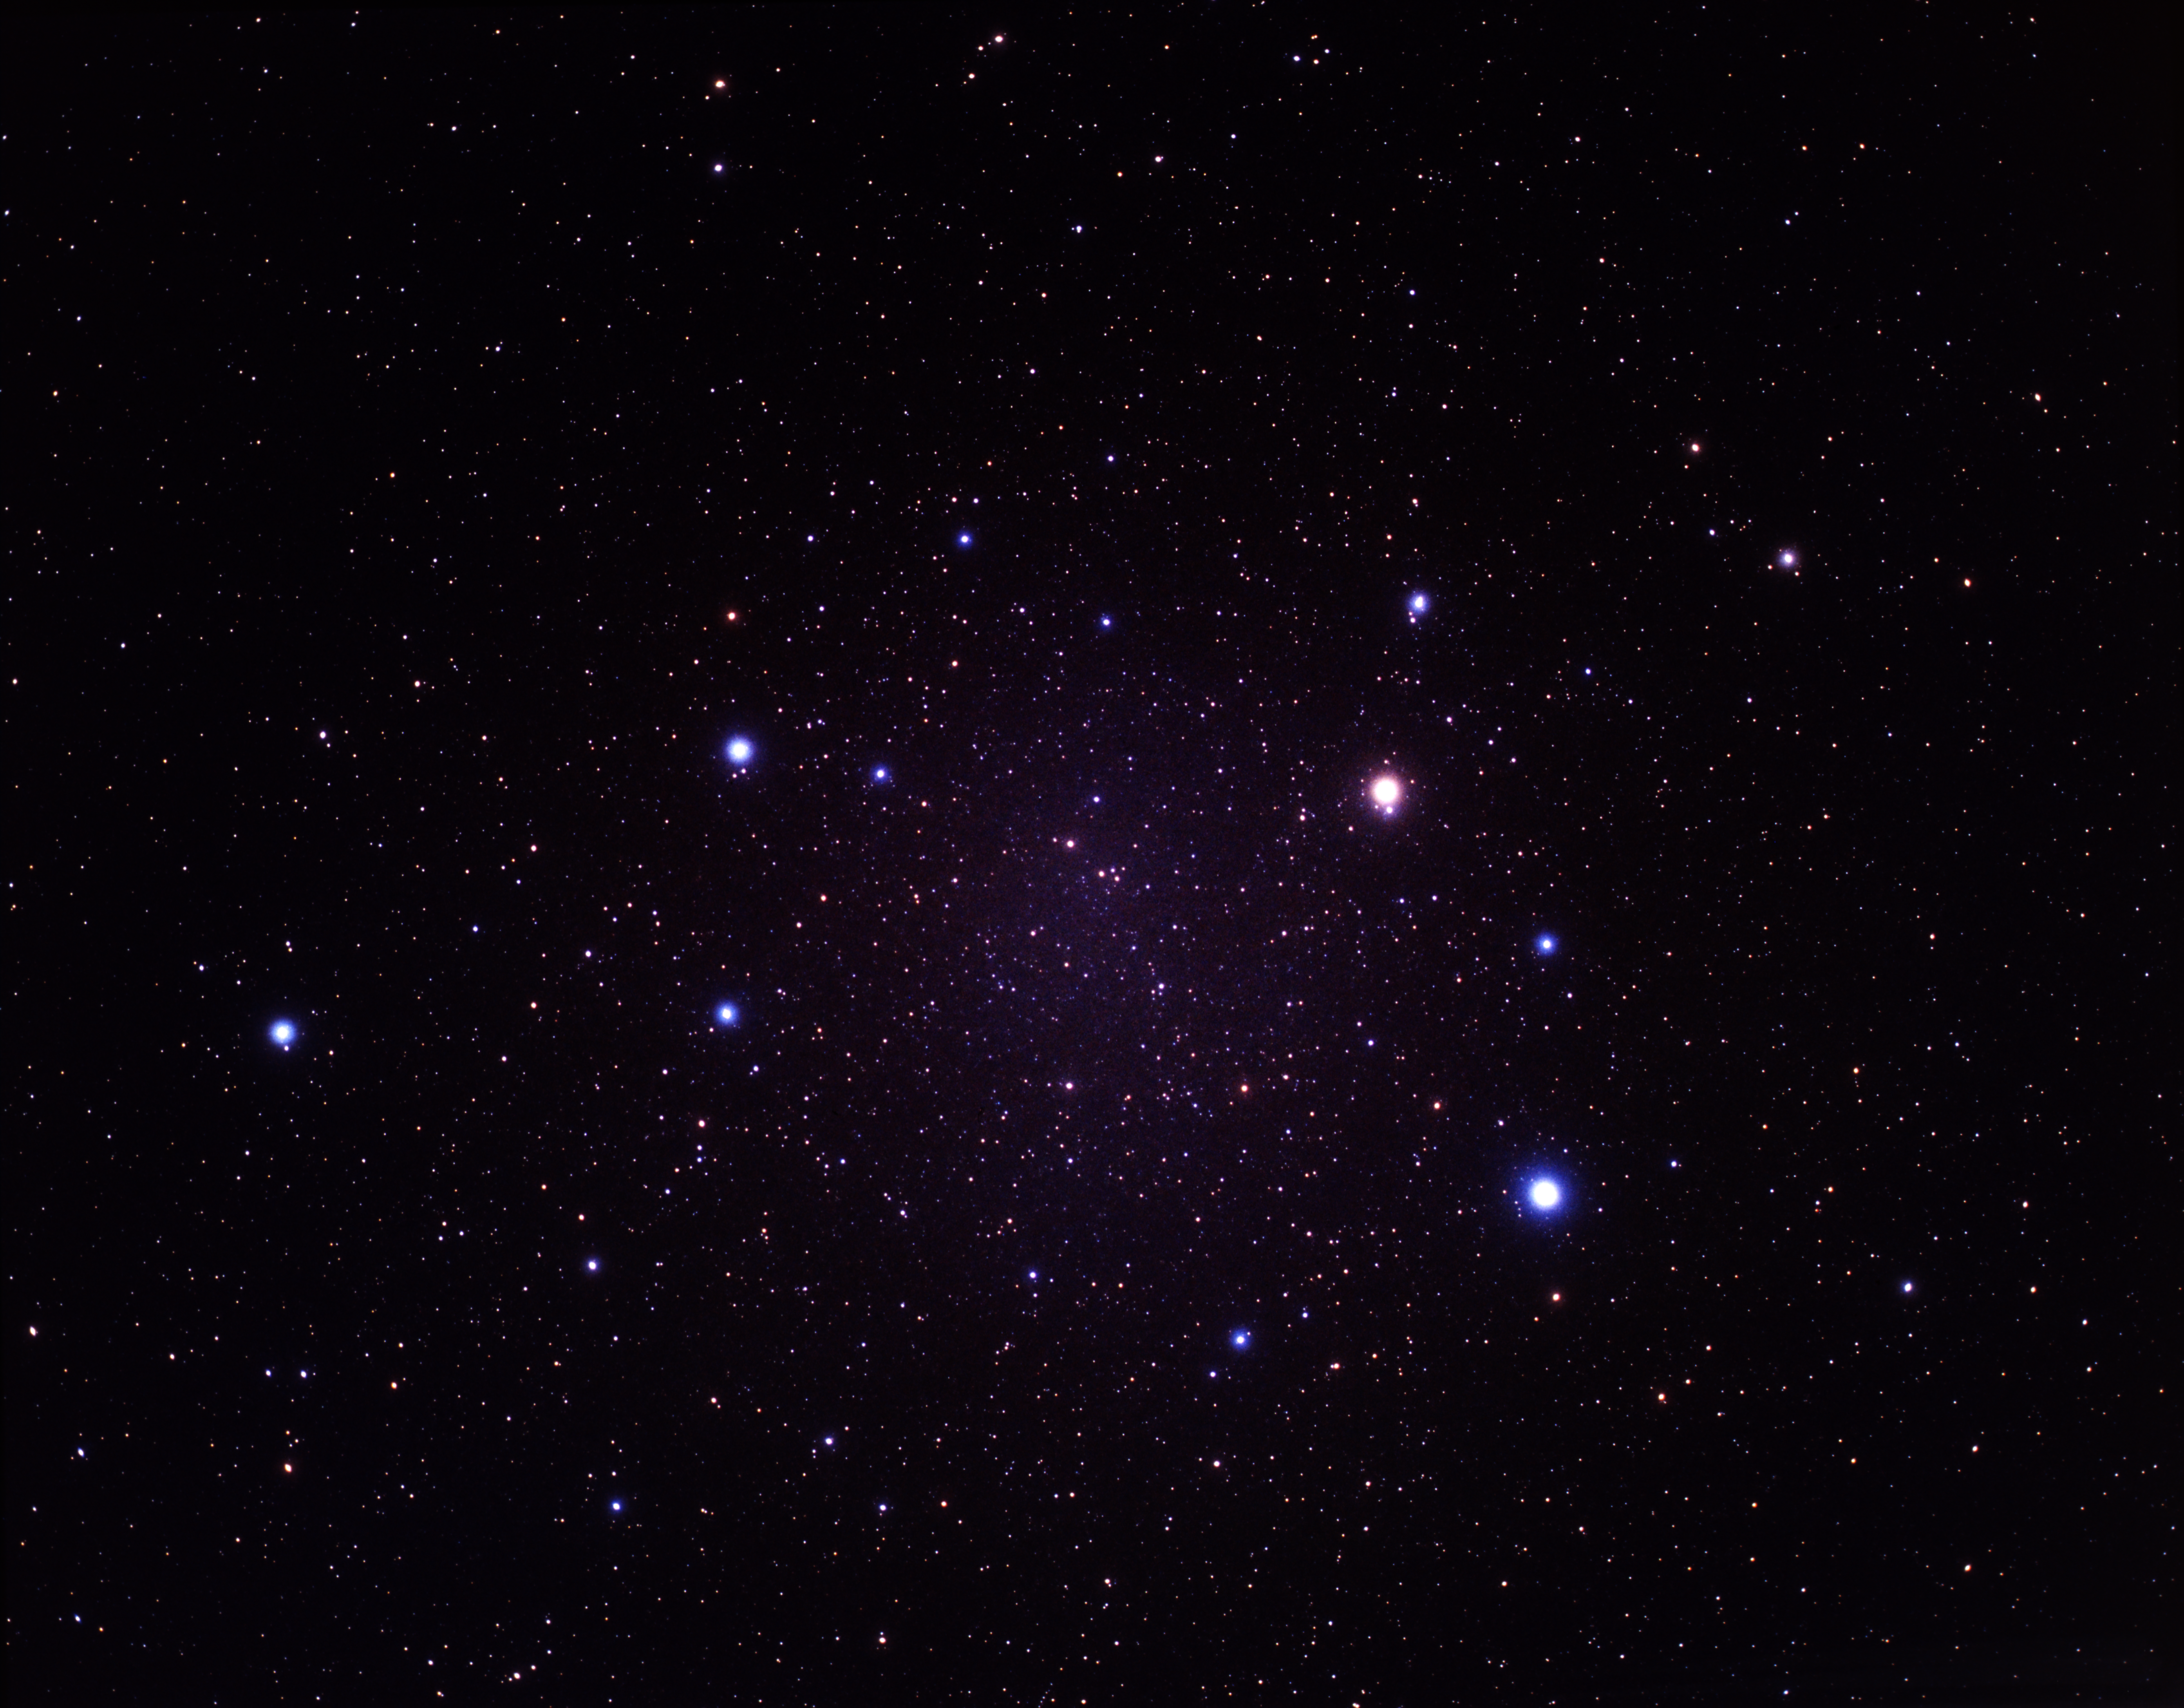

Wide-field image of Leo and Arp 87 (ground-based image)

A wide-field image showing the constellation of Leo. The interacting galaxy pair, Arp 87, is located to the left of the image above Leos's "hind legs".

Credit: A. Fujii